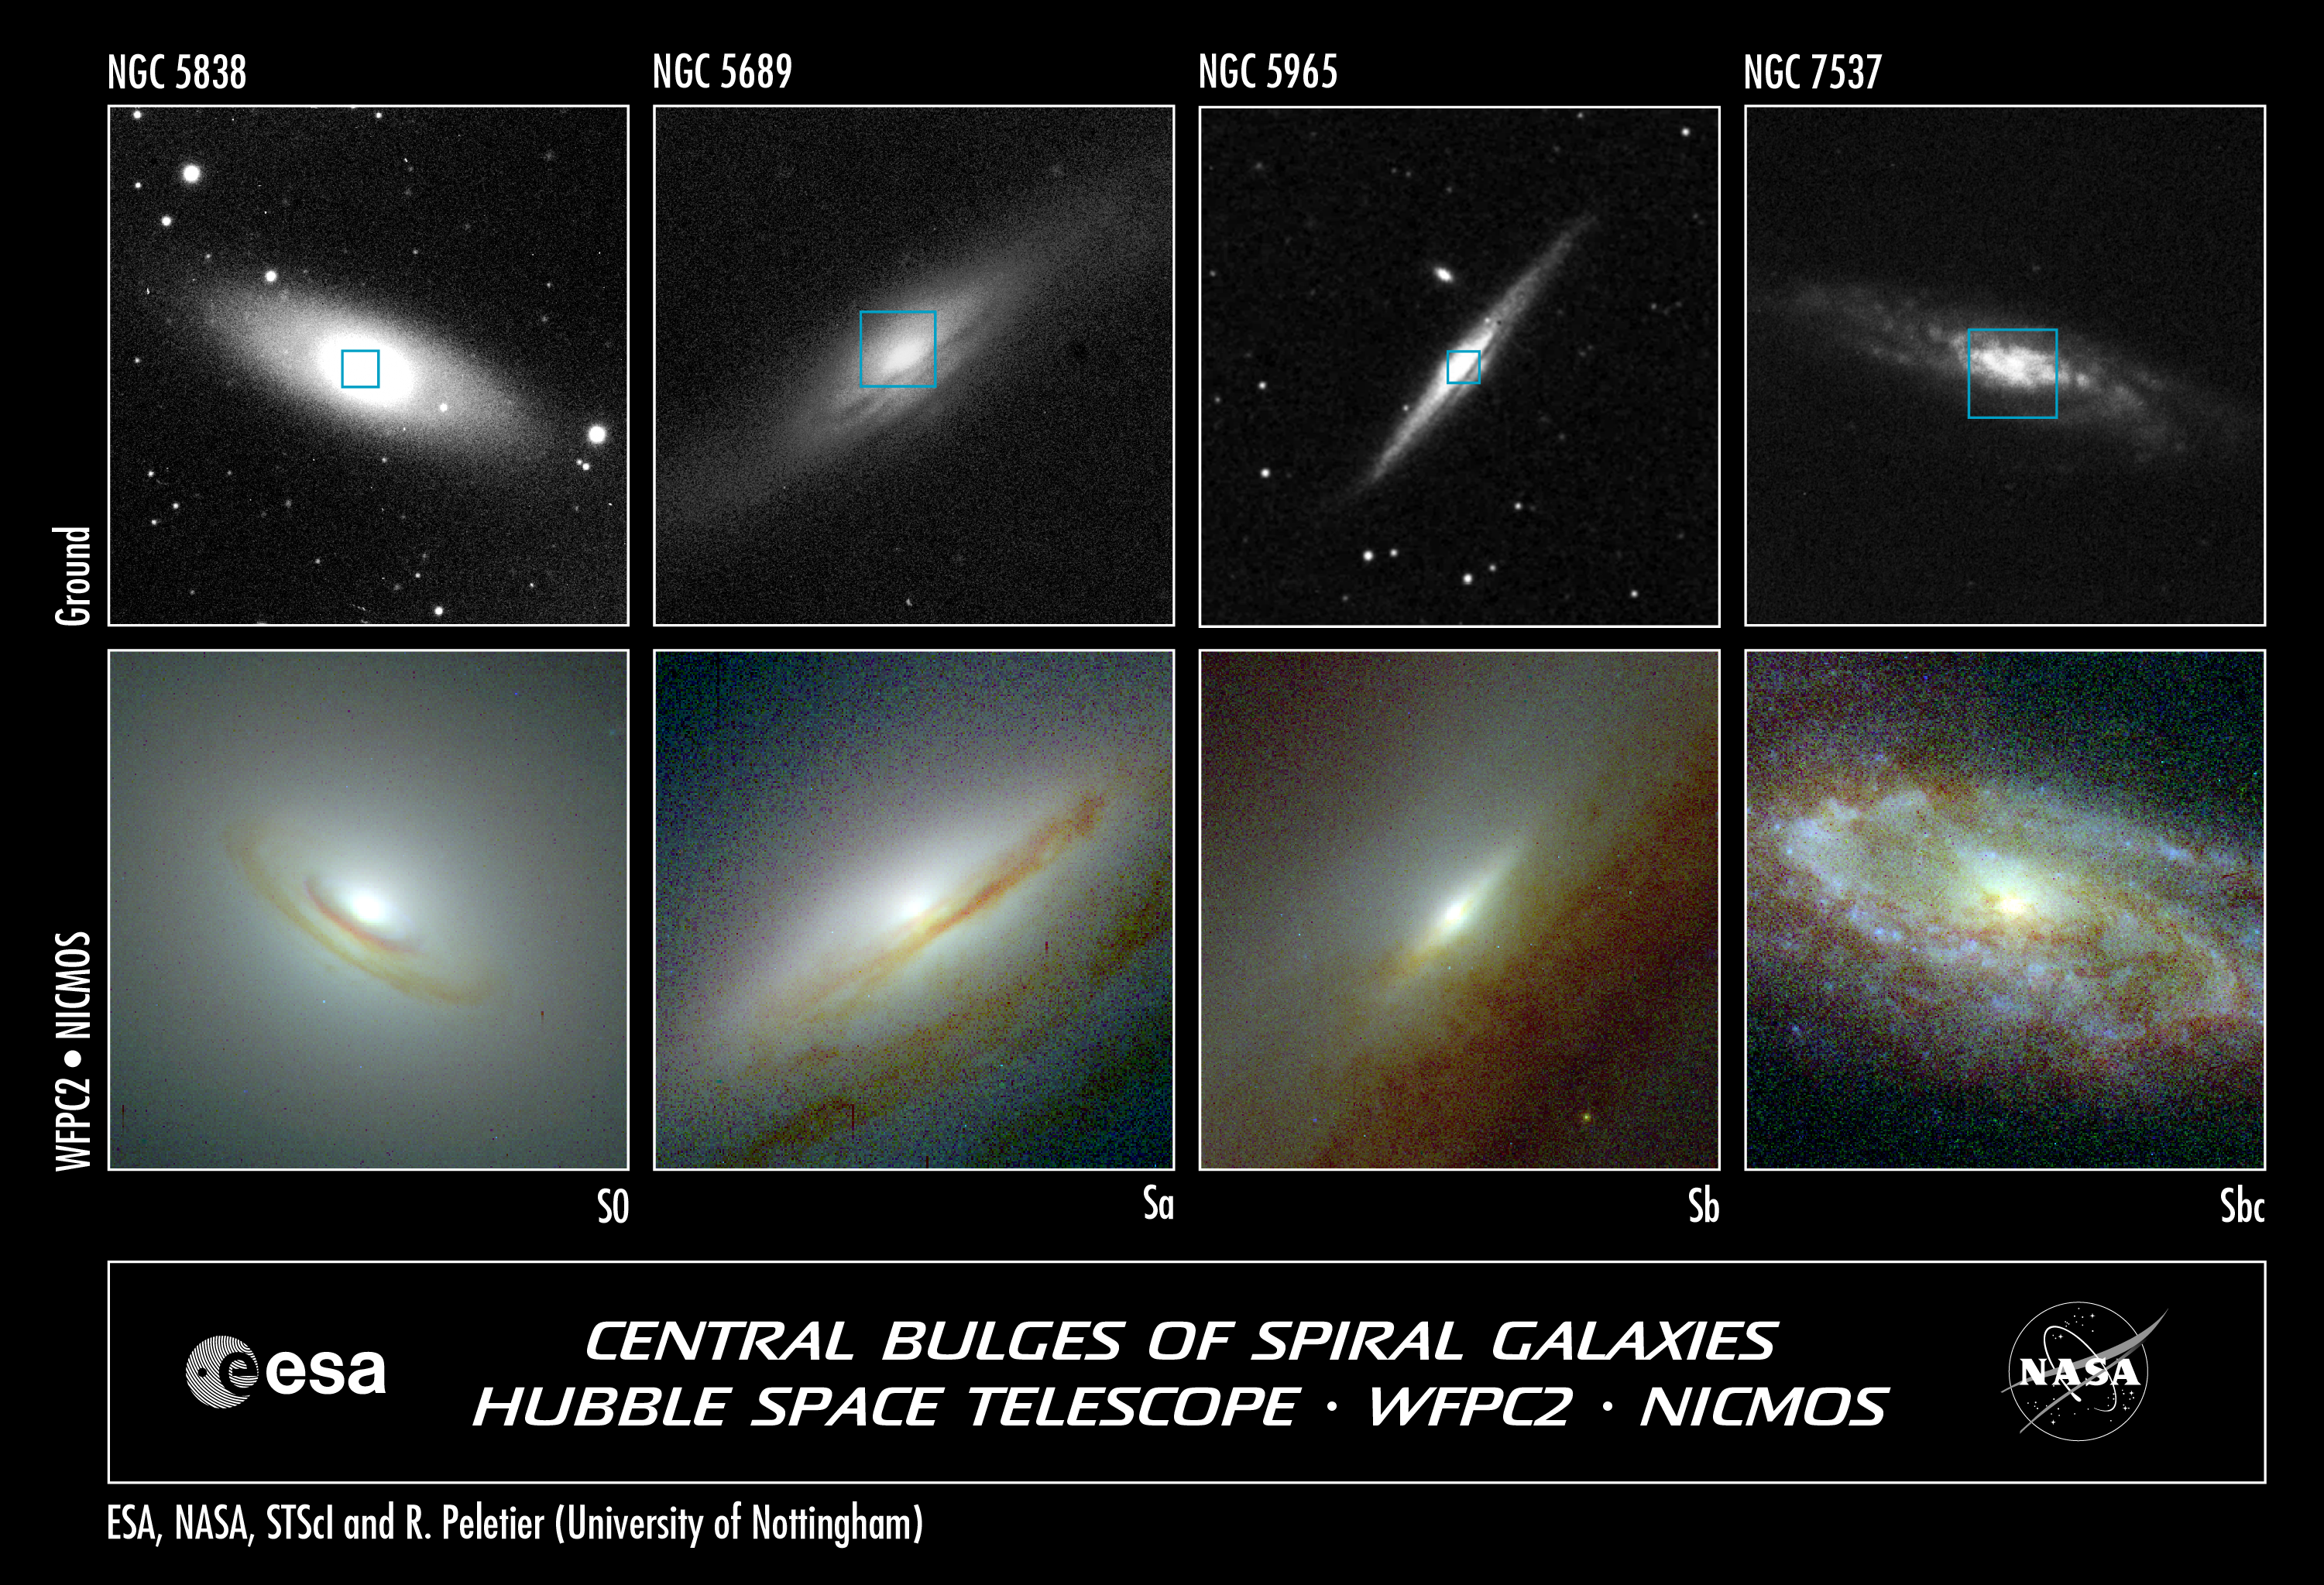

Starry Bulges Yield Secrets to Galaxy Growth (Hubble and Ground-Based View)

Astronomers have combined information from the NASA/ESA Hubble Space Telescope's visible- and infrared-light cameras to show the hearts of four spiral galaxies peppered with ancient populations of stars. The top row of pictures, taken by a ground-based telescope, represents complete views of each galaxy. The blue boxes outline the regions observed by the Hubble telescope.

Credit: Allan Sandage (The Observatories of the Carnegie Institution of Washington) and John Bedke (Computer Sciences Corporation and the Space Telescope Science Institute), NASA and John Trauger (Jet Propulsion Laboratory), NASA, ESA, and C. Marcella Carollo (Columbia University)